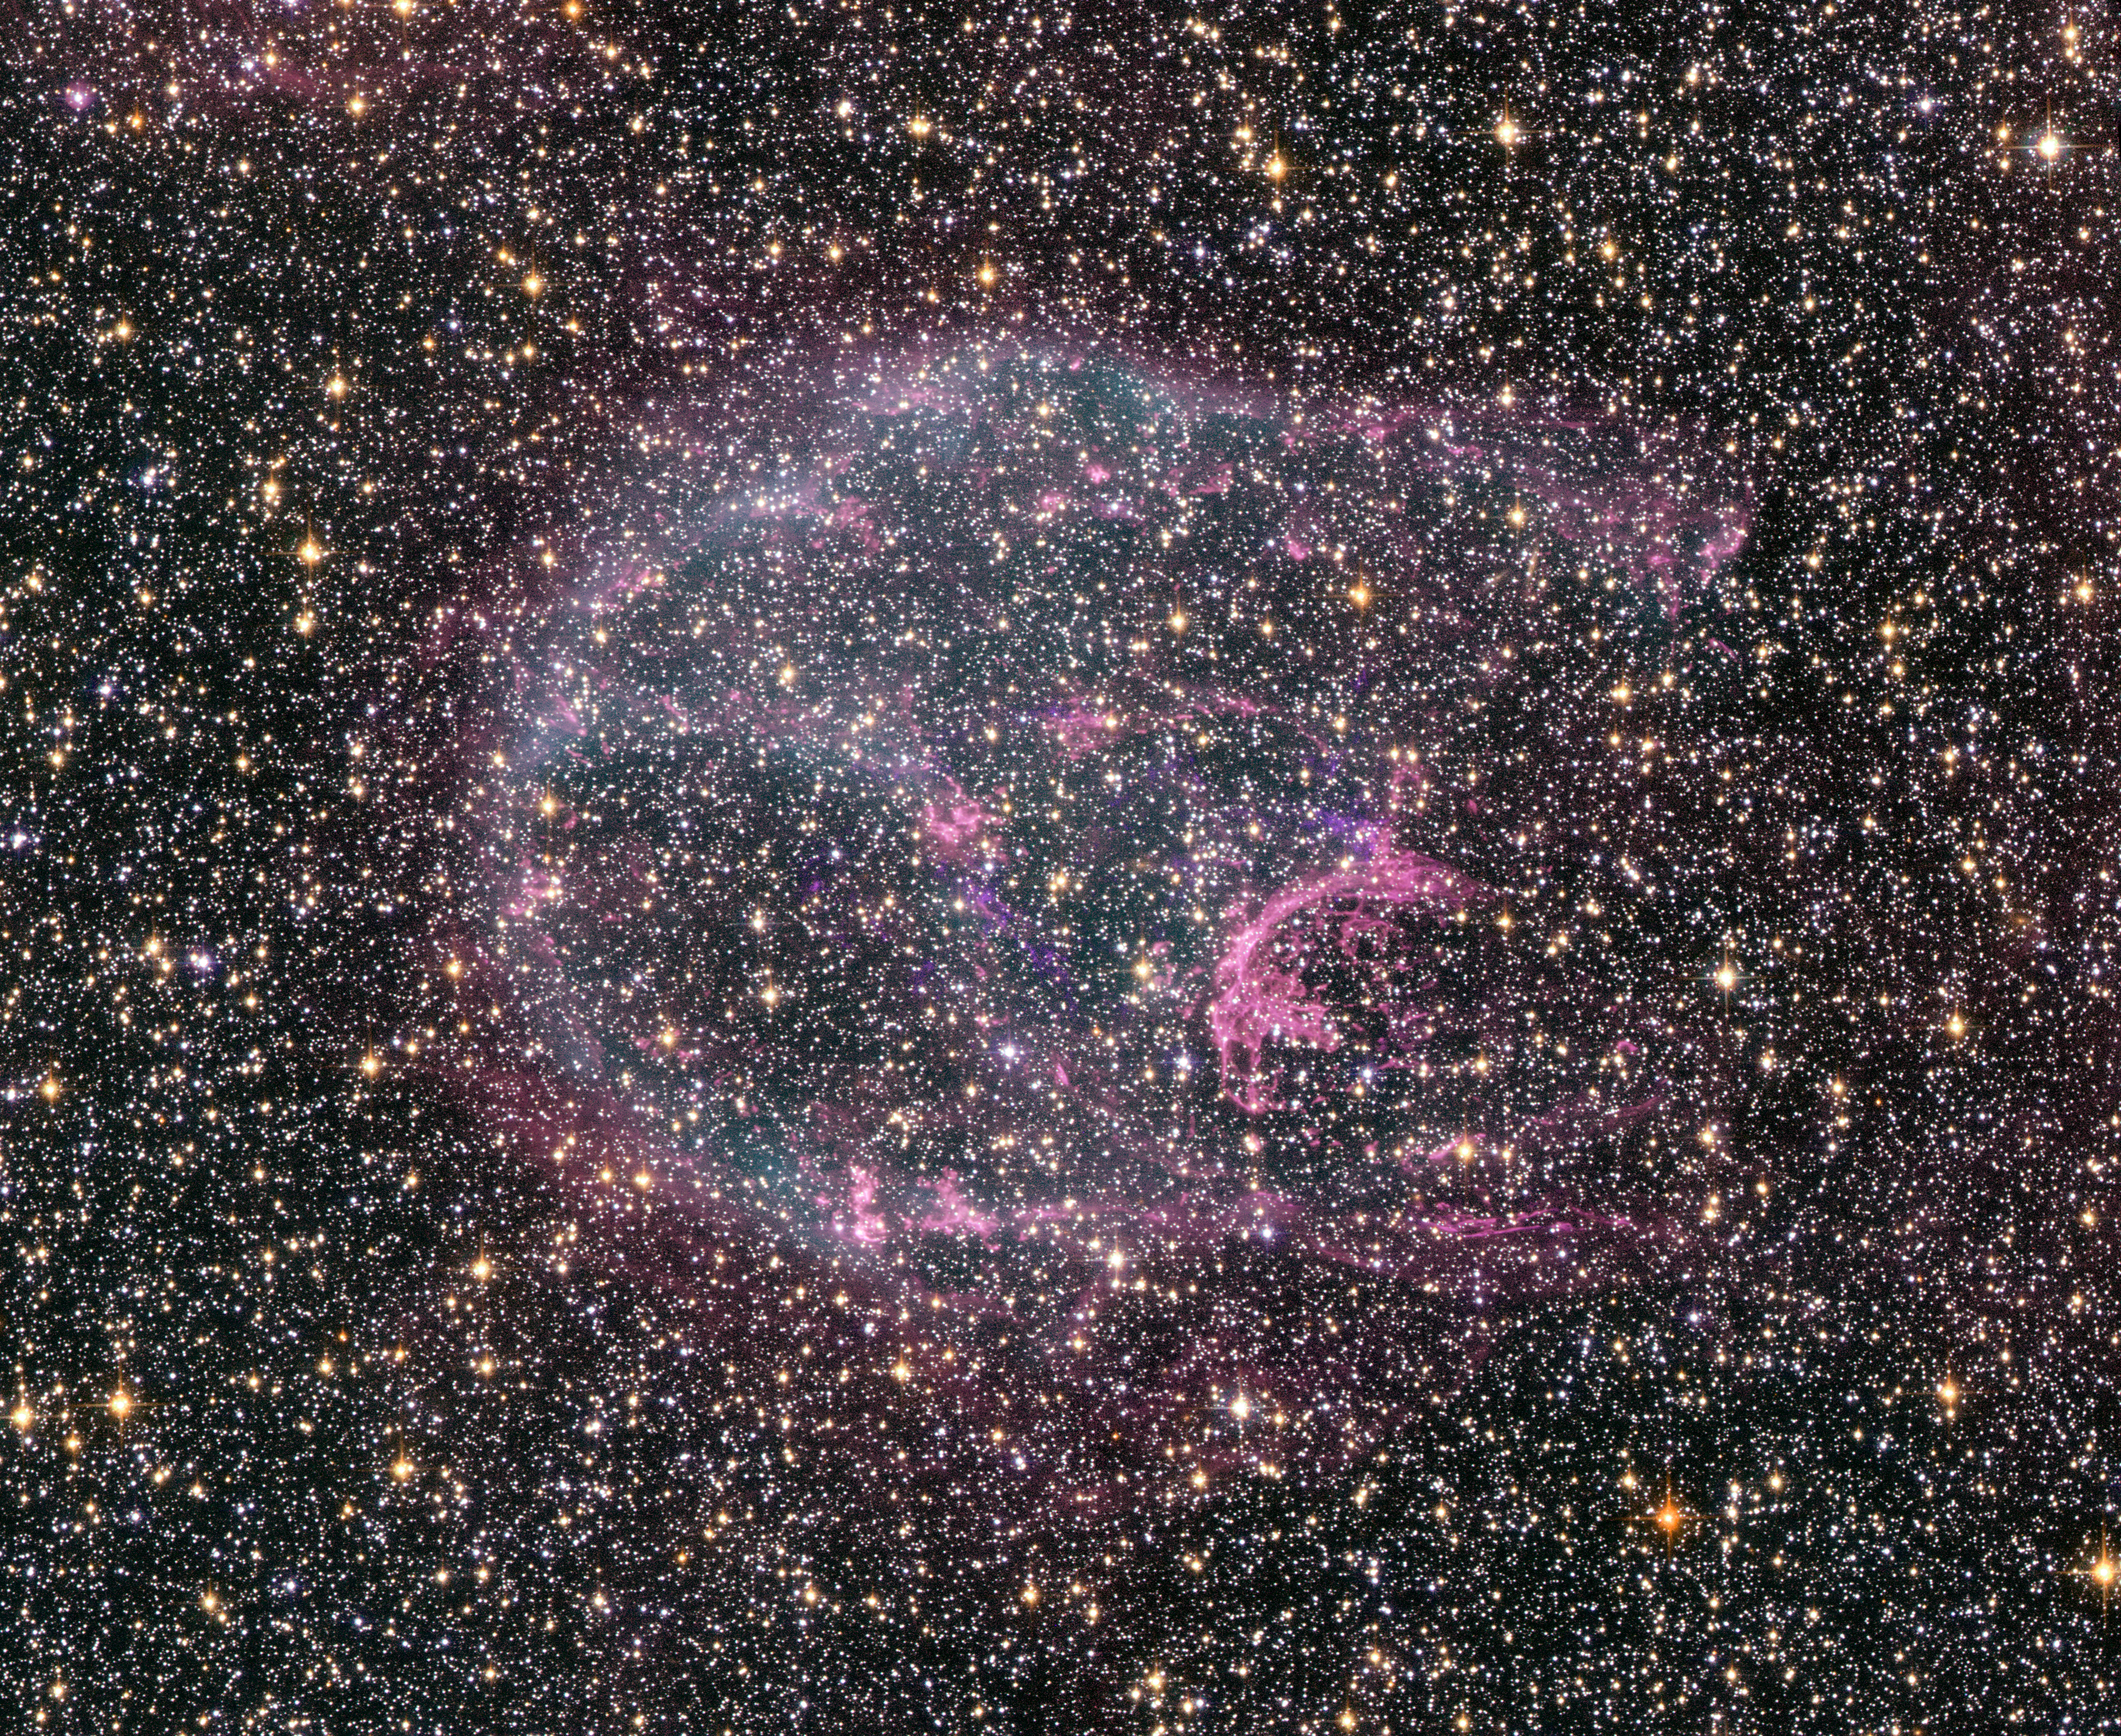

NASA Space Observatories Glimpse Faint Afterglow of Nearby Stellar Explosion

Intricate wisps of glowing gas float amid a myriad of stars in this image created by combining data from the NASA/ESA Hubble Space Telescope and Chandra X-ray Observatory. The gas is a supernova remnant, cataloged as N132D, ejected from the explosion of a massive star that occurred some 3,000 years ago. This titanic explosion took place in the Large Magellanic Cloud, a nearby neighbor galaxy of our own Milky Way.

Credit: NASA, ESA, and The Hubble Heritage Team STScI/AURA)